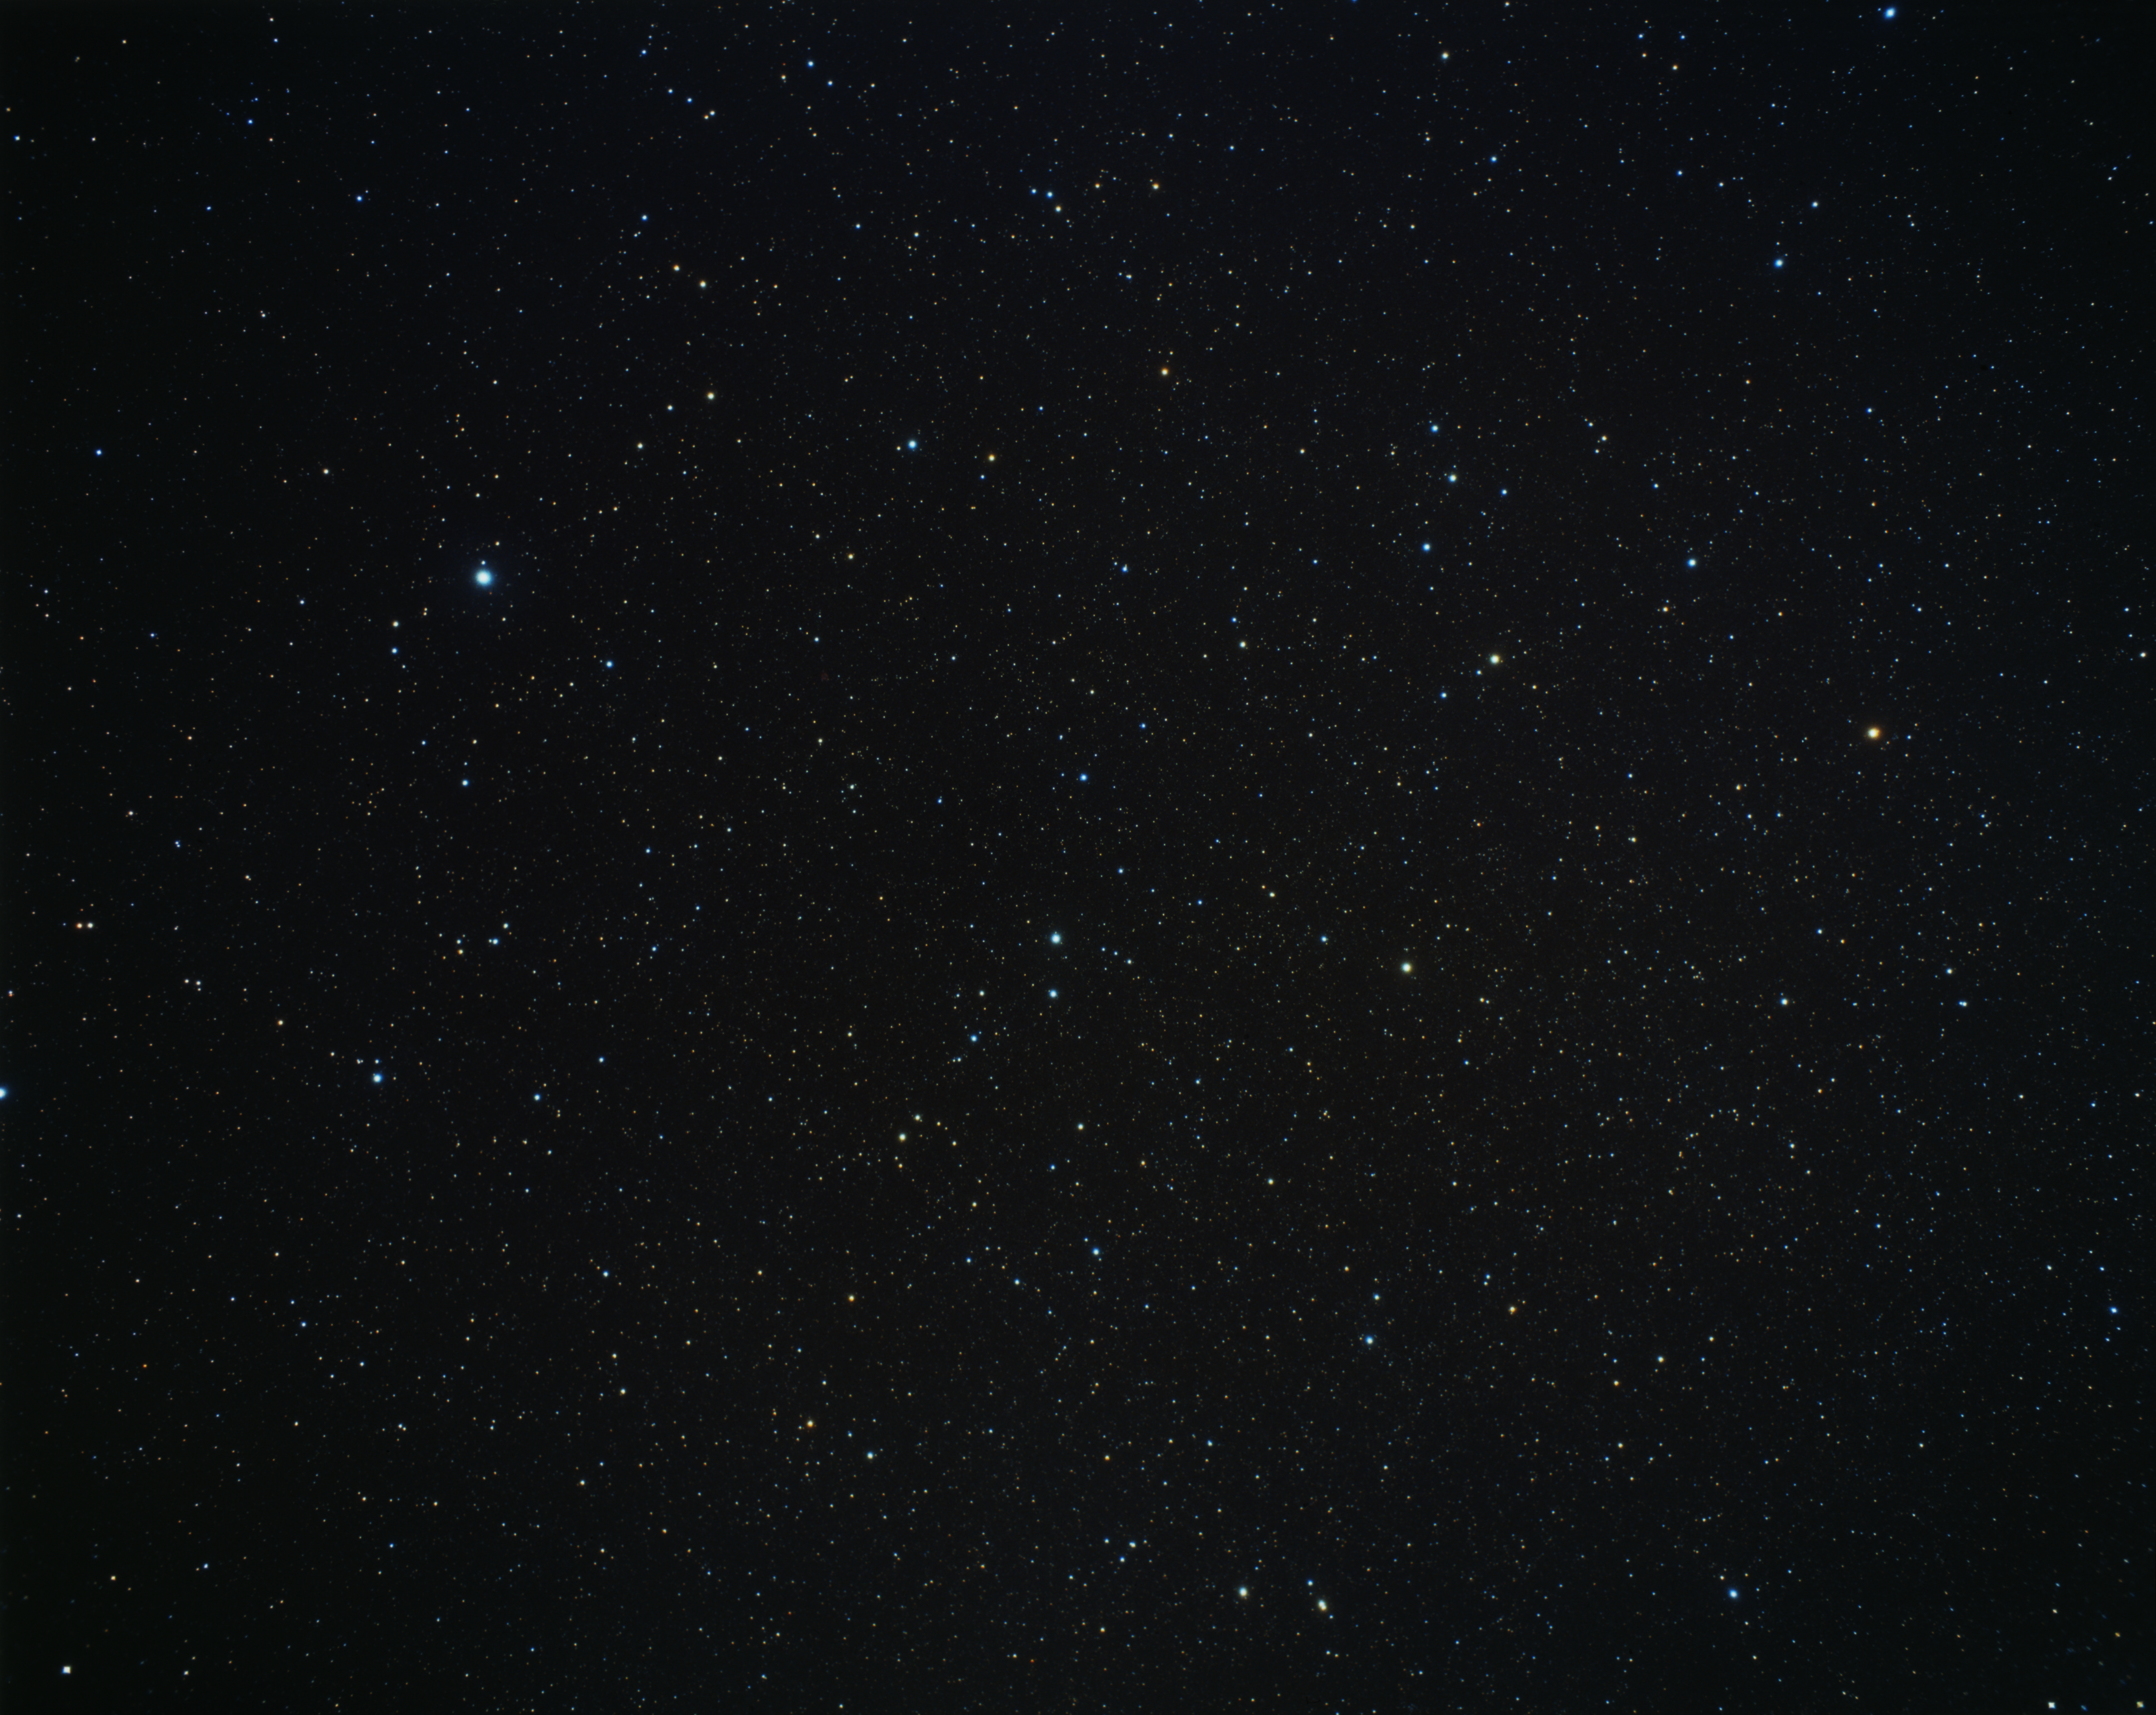

A wide-field view of Piscis Austrinus, Aquarius and Capricornus (ground-based image)

This picture, taken with a small ground-based camera, shows on its central-left portion the constellation Piscis Austrinus, the Southern Fish. The brightest star in the image is Fomalhaut. Also in this picture are parts of the constellations of Aquarius and Capricornus on the right.

Credit: A. Fujii